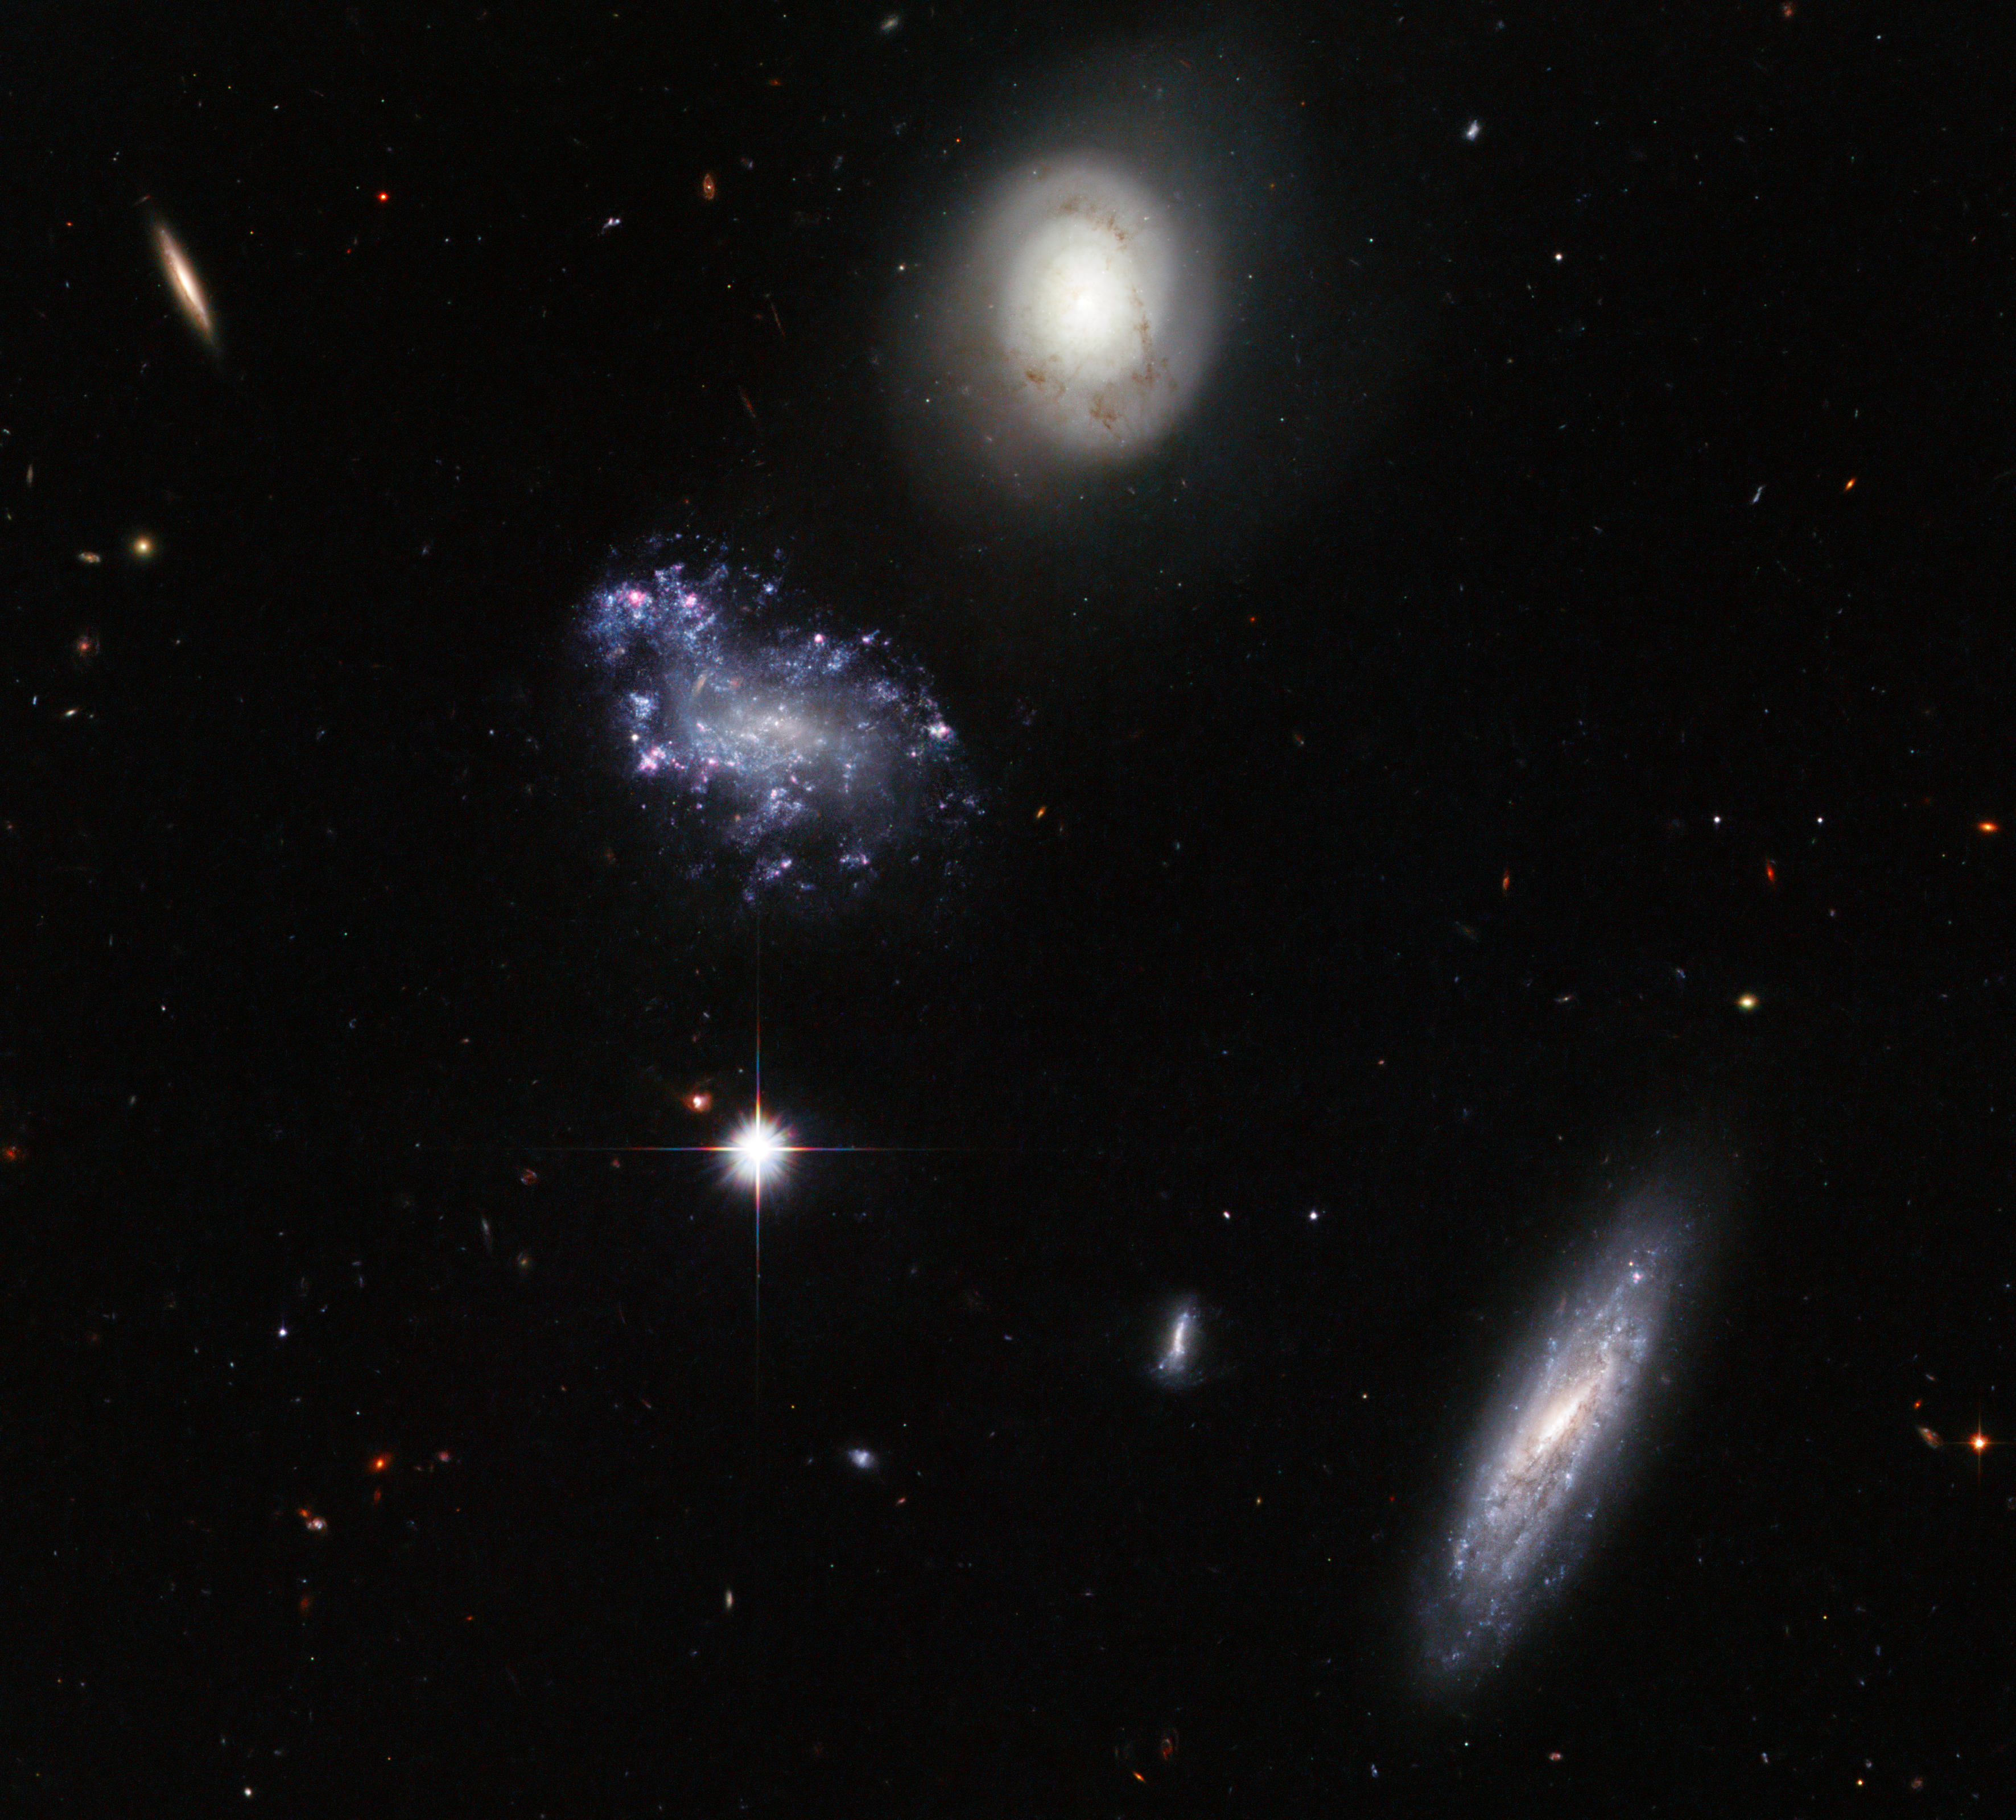

A clump of galaxy misfits

That galaxies come in very different shapes and sizes is dramatically demonstrated by this striking Hubble image of the Hickson Compact Group 59. Named by astronomer Paul Hickson in 1982, this is the 59th such collection of galaxies in his catalogue of unusually close groups. What makes this image interesting is the variety on display. There are two large spiral galaxies, one face-on with smooth arms and delicate dust tendrils, and one highly inclined, as well as a strangely disorderly galaxy featuring clumps of blue young stars. We can also see many apparently smaller, probably more distant, galaxies visible in the background. Hickson groups display many peculiarities, often emitting in the radio and infrared and featuring active star-forming regions. In addition their galaxies frequently contain Active Galactic Nuclei powered by supermassive black holes, as well large quantities of dark matter.

The NASA/ESA Hubble Space Telescope's Advanced Camera for Surveys, using the Wide Field Channel, captured this image of HCG059 in 2007. The picture was created from images taken through blue, yellow and near-infrared filters (F435W, F606W and F814W). The total exposure times per filter were 57 minutes, 41 minutes and 35 minutes respectively. The field of view is about 3.4 arcminutes across.

Credit: ESA/Hubble and NASA